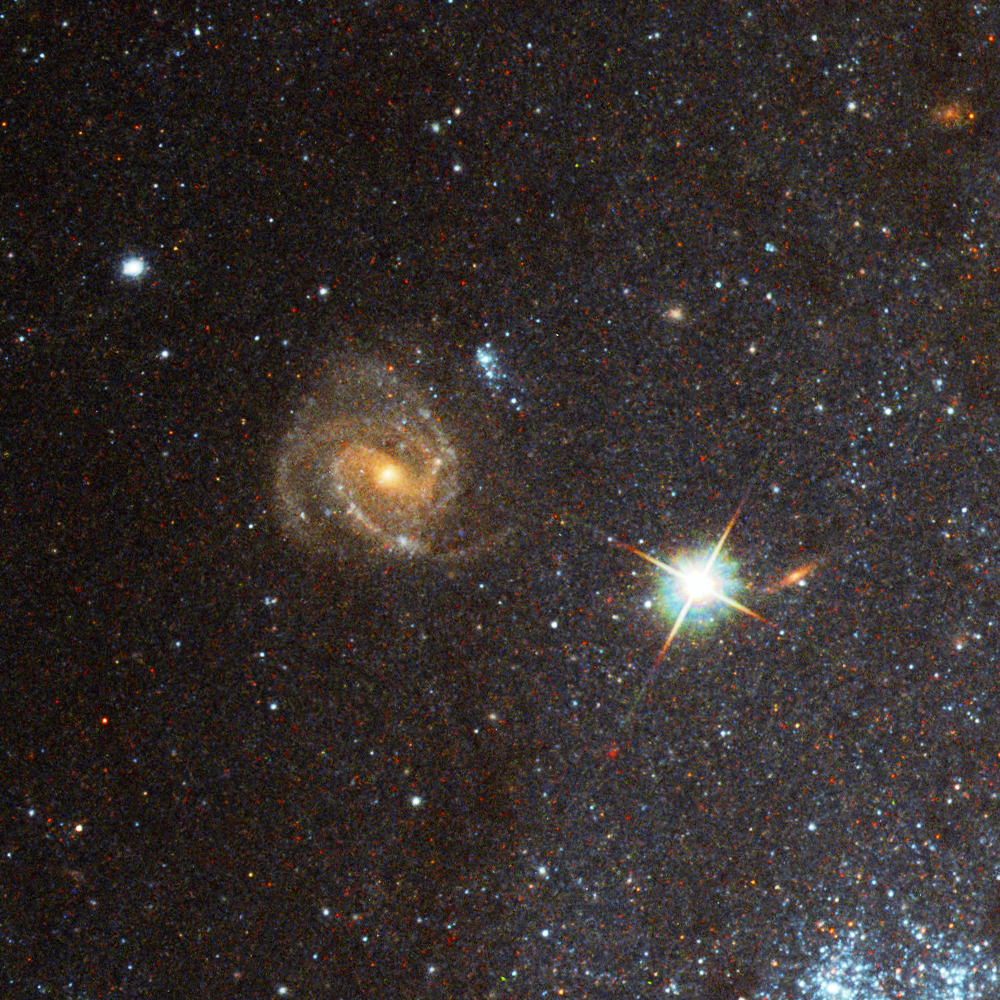

Pinwheel Galaxy close-up 5

Another "grand design" spiral lies behind the Pinwheel Galaxy itself and is visible through its disk. Hubble's incredible resolution makes it possible to make out star forming regions in this distant galaxy.

Credit: Image: European Space Agency & NASA
Acknowledgements:
Project Investigators for the original Hubble data: K.D. Kuntz (GSFC), F. Bresolin (University of Hawaii), J. Trauger (JPL), J. Mould (NOAO), and Y.-H. Chu (University of Illinois, Urbana)
Image processing: Davide De Martin (ESA/Hubble)
CFHT image: Canada-France-Hawaii Telescope/J.-C. Cuillandre/Coelum
NOAO image: George Jacoby, Bruce Bohannan, Mark Hanna/NOAO/AURA/NSF